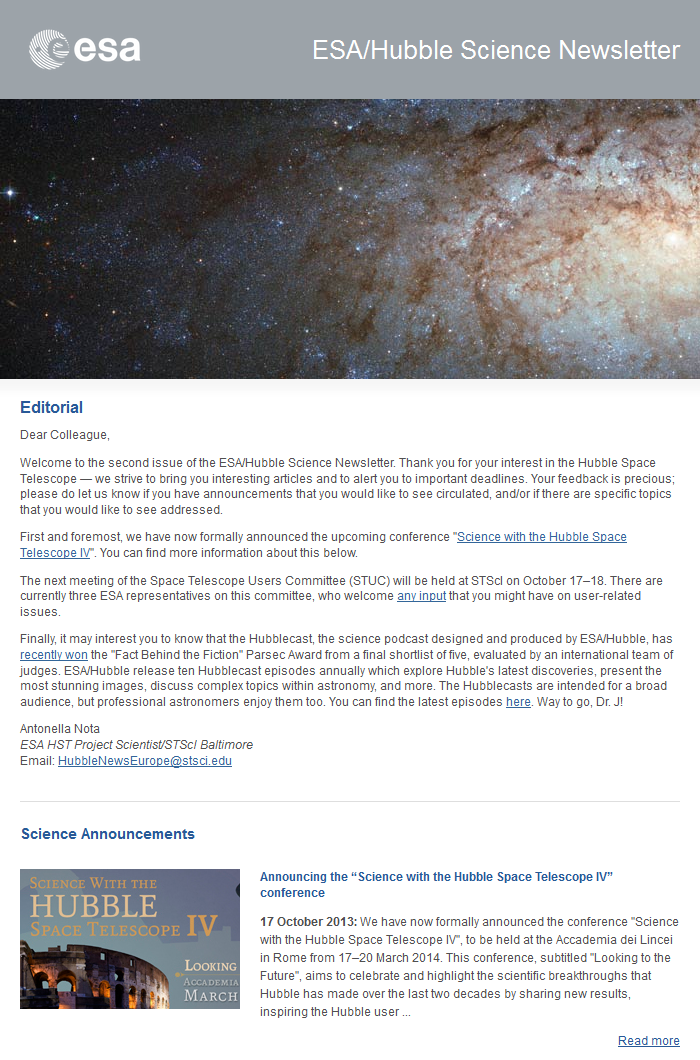

The October 2013 issue of the ESA/Hubble Science Newsletter

Screenshot of the top portion of the October 2013 issue of the ESA/Hubble Science Newsletter.

October 2013 edition of the ESA/Hubble Science Newsletter

Credit: NASA & ESA